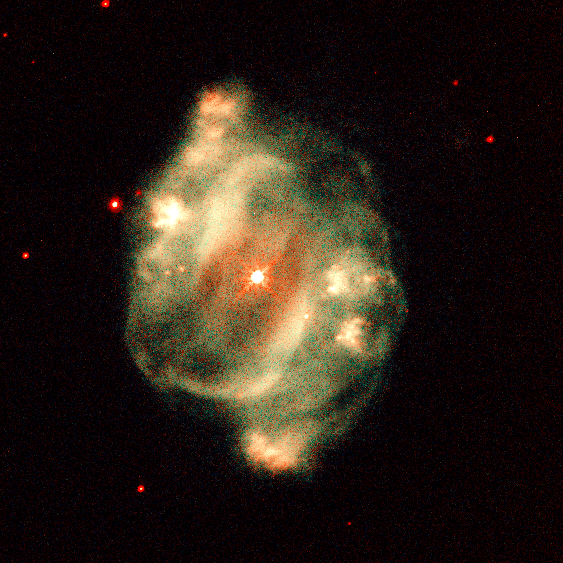

Hubble's Planetary Nebula Gallery. A View of NGC 5307

NGC 5307 also lies in Centaurus but is about 10, 000 light-years away and has a diameter of approximately 0.6 light-year. It is an example of a planetary nebula with a pinwheel or spiral structure; each blob of gas ejected from the central star has a counterpart on the opposite side of the star.

Credit: Howard Bond ( Space Telescope Science Institute), Robin Ciardullo (Pennsylvania State University) and NASA/ESA